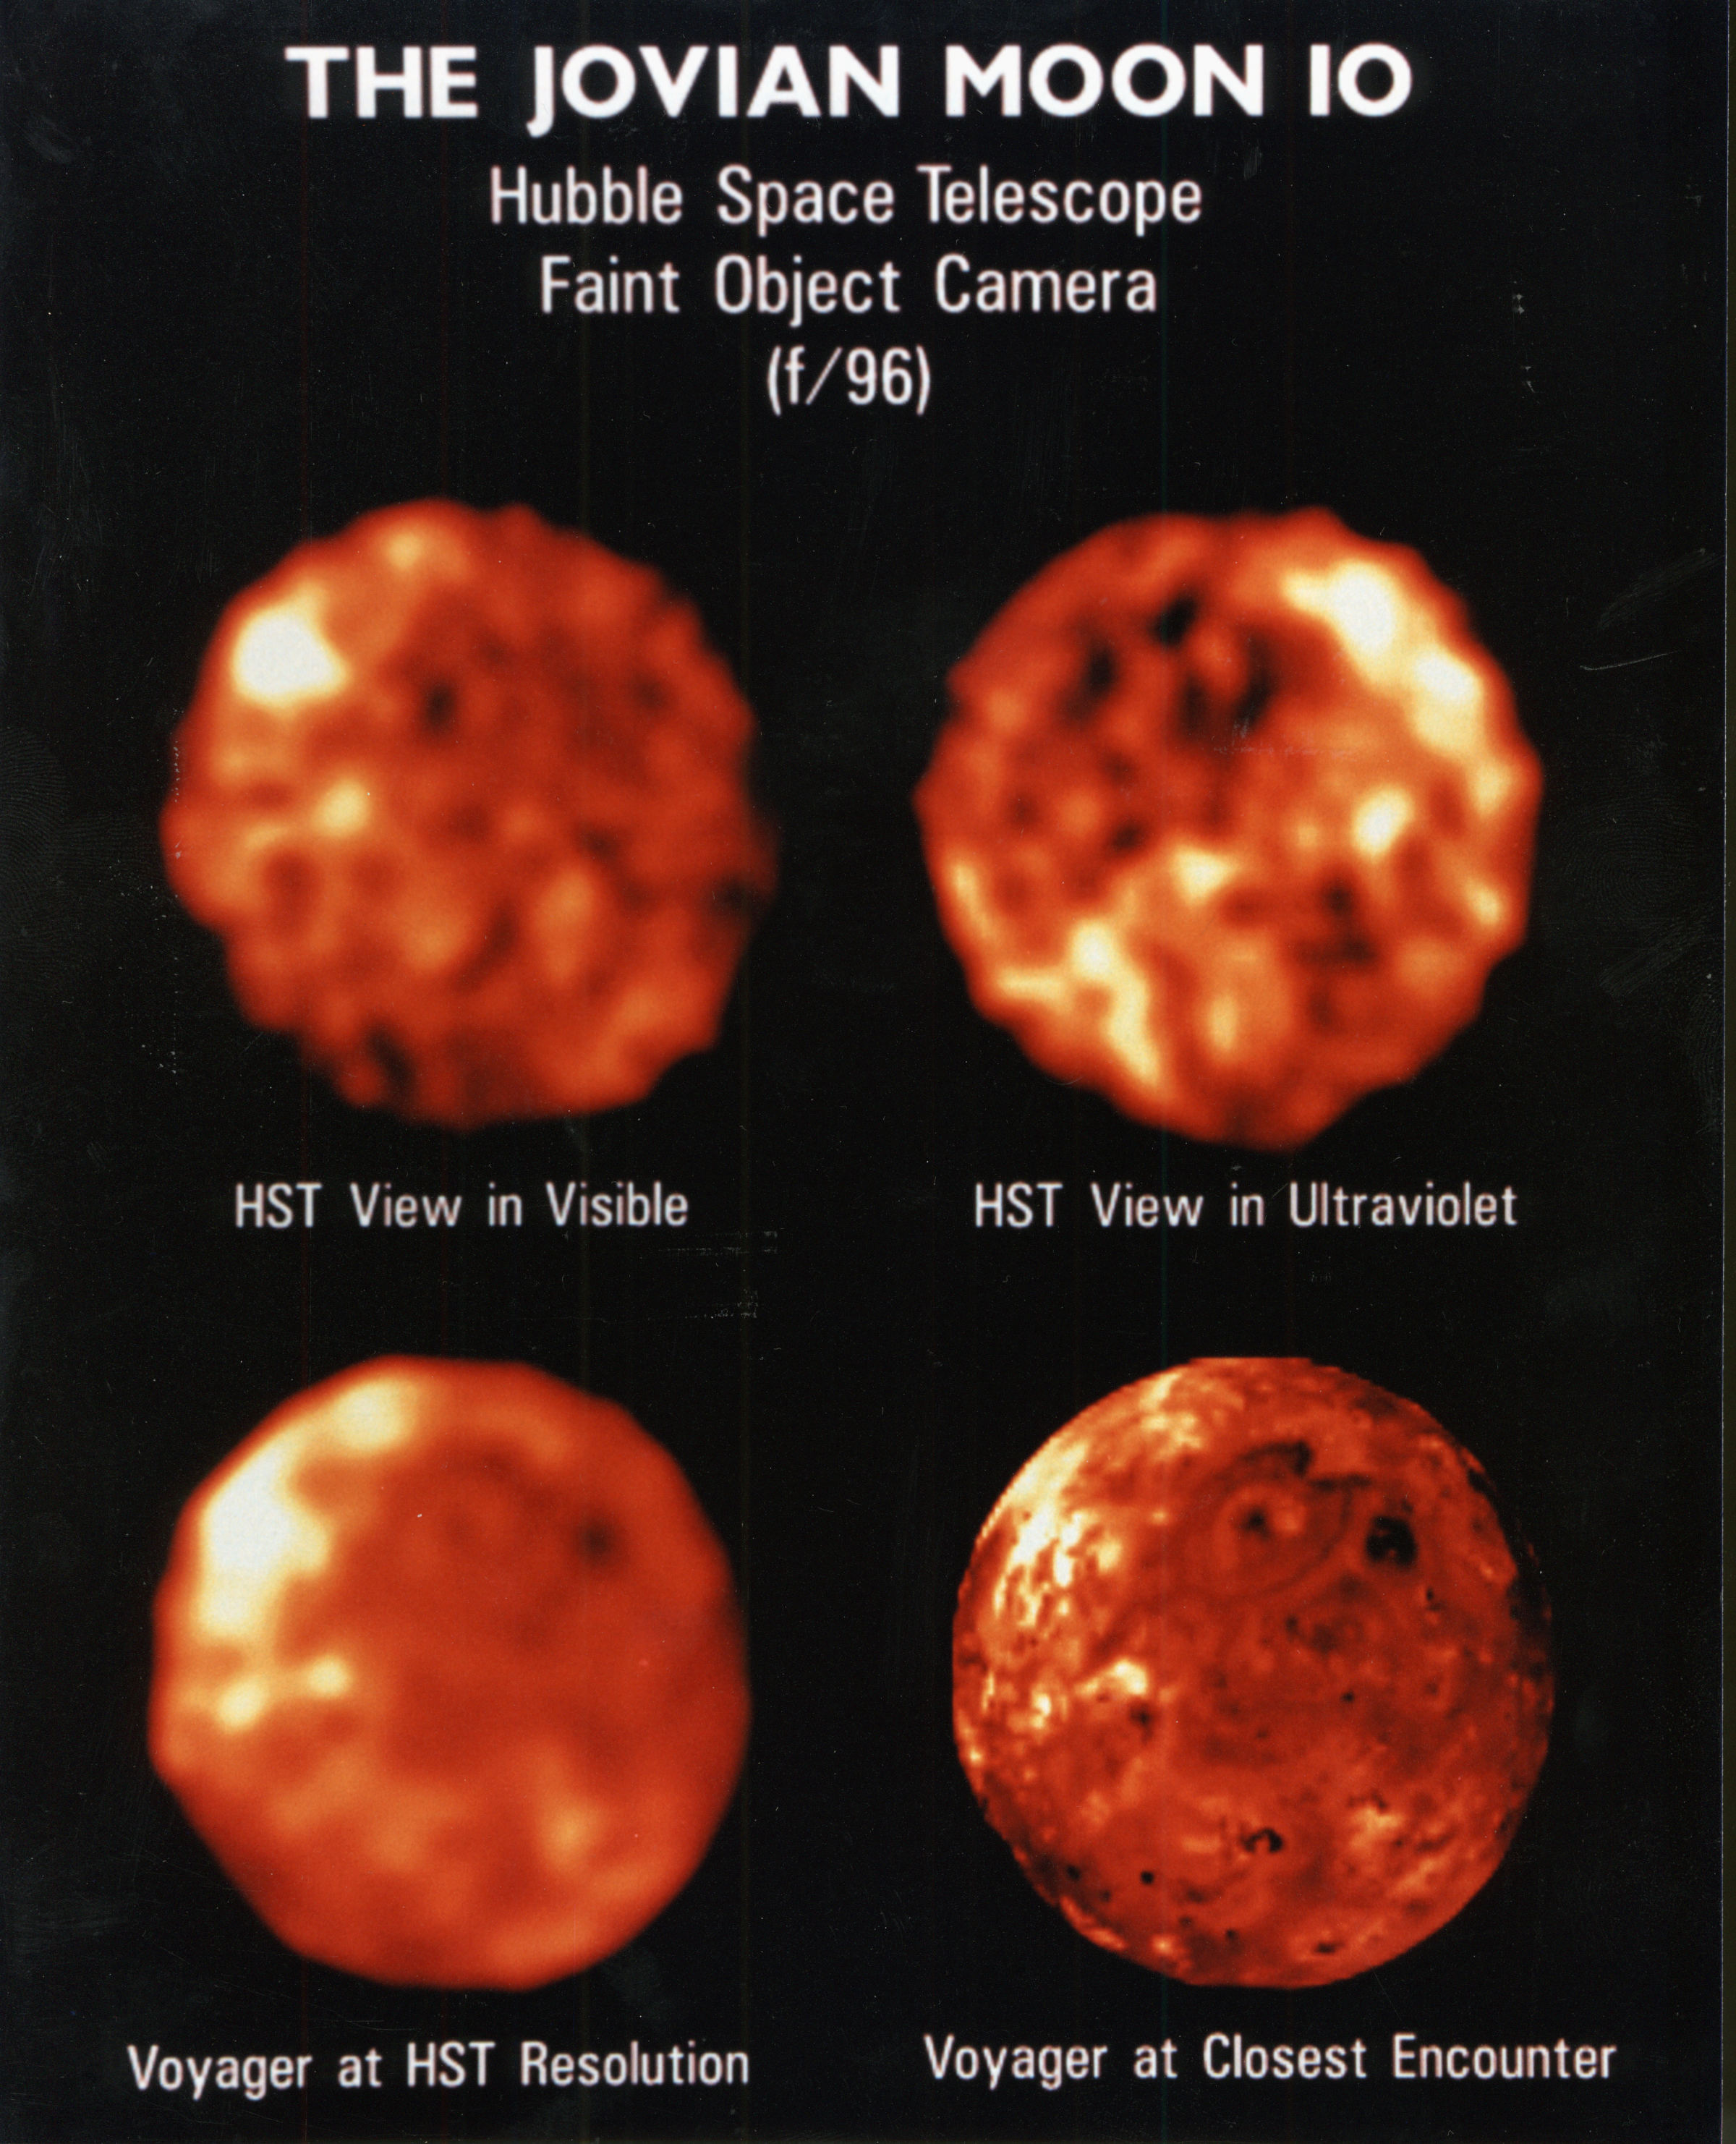

NASA Husble Space Telescope Comparison Images of Io Reveal New Information About Surface Composition and Variability

[Upper Left]
A visible-light image of the geologically active trailing hemisphere of the Jovian moonIo, taken on March 15 1992, when Io was 414 million miles (666 kilometrs) from Earth. HSTresolves features as small as 150 miles (241 kilometrs) across.

[Upper Right]
An ultraviolet light (UV) picture of the same hemisphere show's Io's surface. Regions which look bright In visible light are dark in UV. The most likely explanation is that large areas of Io are covered with a sulfur dioxide frost. Because sulfur dioxide is a strong absorber of UV radiation sulfur dioxide-rich areas are dark in the UV though they are bright in visible light.

Credit: Francesco Paresce (ESAI STScI)Paola Sartoretti, University of Padova